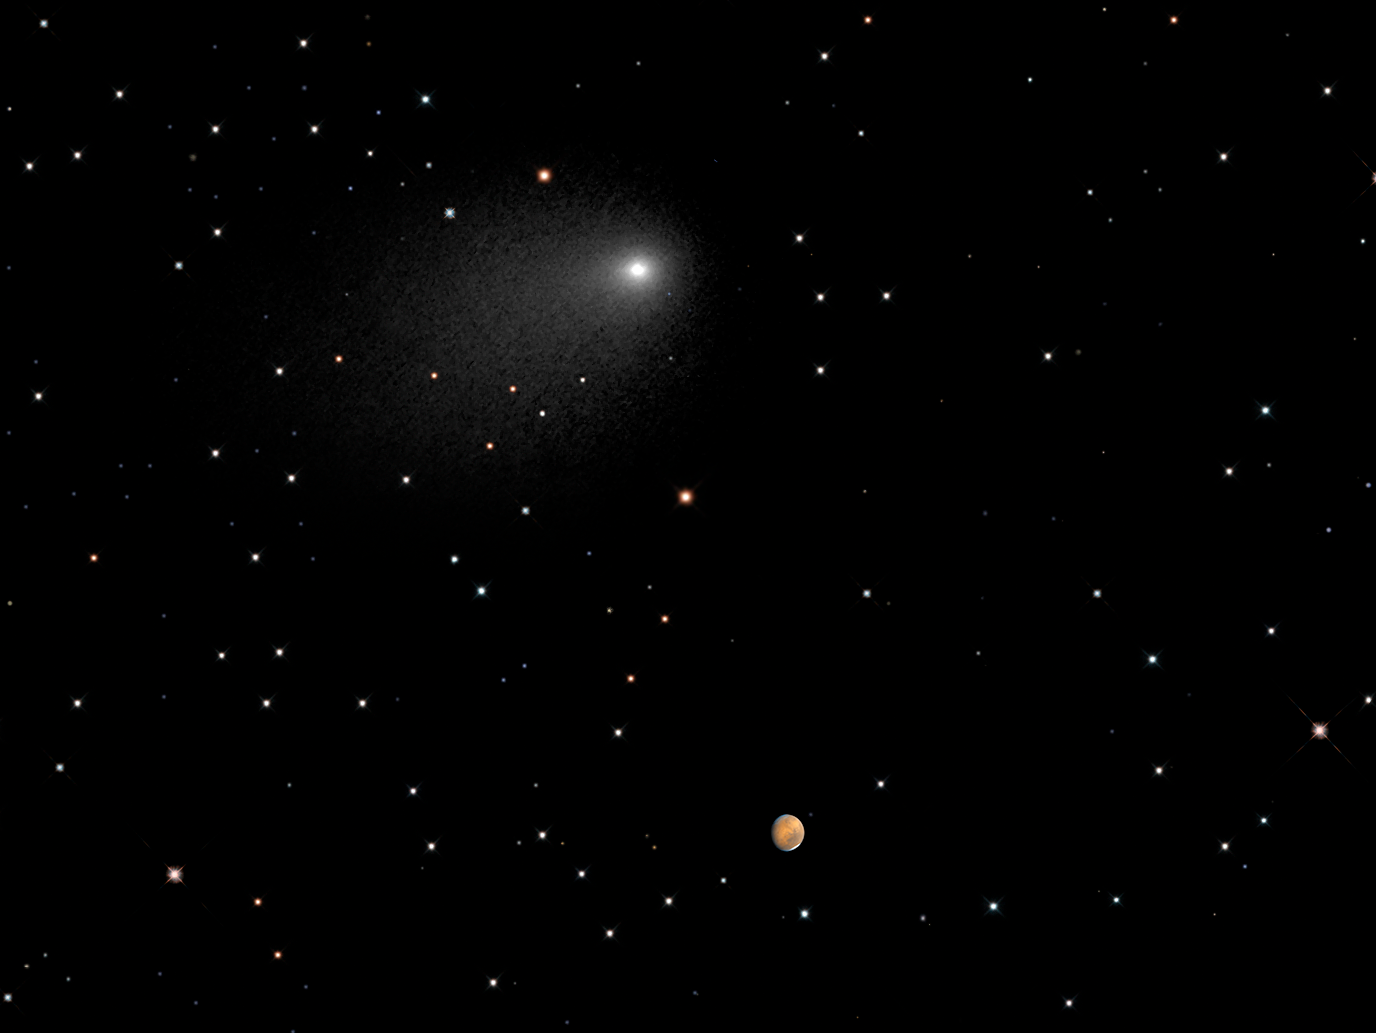

Illustration showing Mars and Comet Siding Spring encounter

This illustration — created for a NASA press release — combines data from the NASA/ESA Hubble Space Telescope of Comet Siding Spring and separate Hubble data of Mars.

On 19 October 2014 — the day that the images of both Mars and the comet were taken — at 20:28 CEST, the comet passed within only 140 000 kilometres of the red planet — roughly a third the distance between the Earth and the Moon. At that time the comet and Mars were almost 250 million kilometres from Earth. This flyby of Comet Siding Spring is the closest encounter of a comet with a planet ever observed!

The background starfield, which has been added to this image, is synthesised from ground-based telescope data

Credit: NASA, J.-Y. Li (Planetary Science Institute), C.M. Lisse (JHU/APL), and the Hubble Heritage Team (STScI/AURA)